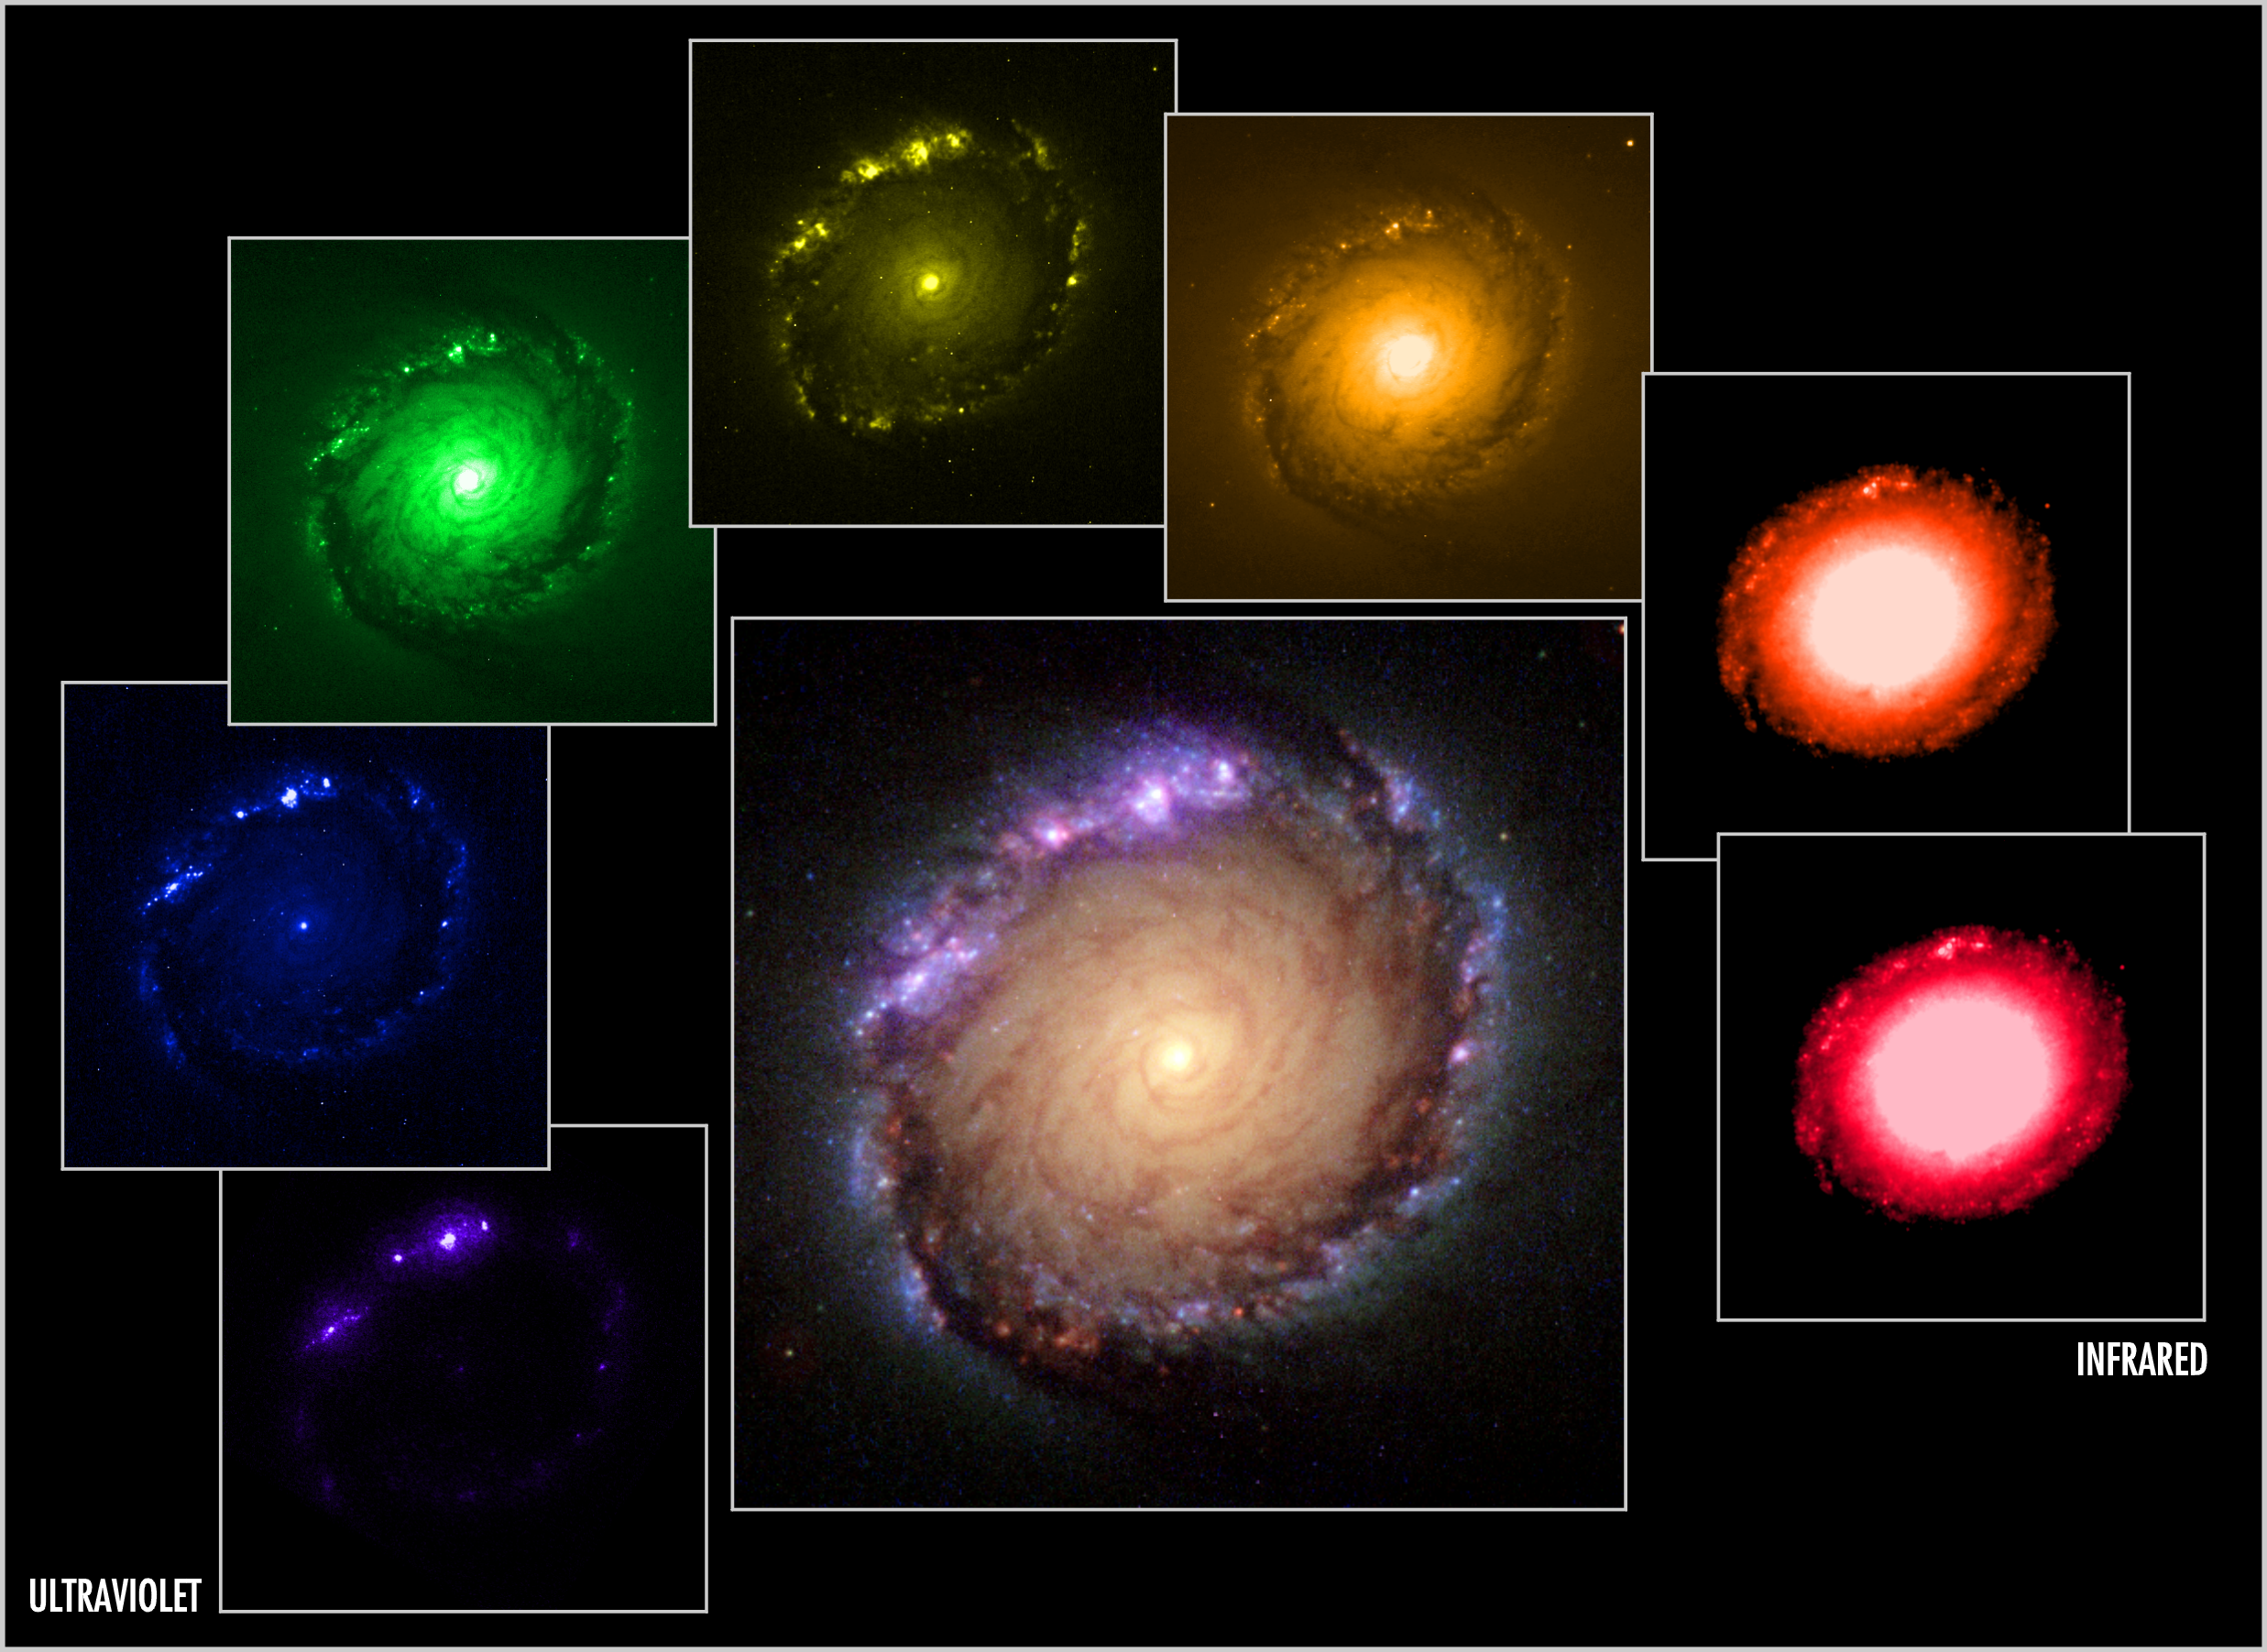

Panel of multi-wavelength and composite images of NGC 1512

Astronomers have used this set of single-colour images, shown around the edge, to construct the colour picture (centre) of a ring of star clusters surrounding the core of the galaxy NGC 1512. These pictures were taken by the NASA/ESA Hubble Space Telescope's Faint Object Camera (FOC), Wide Field and Planetary Camera 2 (WFPC2), and the Near Infrared Camera and Multi-Object Spectrometer (NICMOS).

Each image represents a specific colour or wavelength region of the spectrum, from ultraviolet to near infrared, and shows the wide wavelength region covered by Hubble. Celestial bodies emit light at a variety of wavelengths, anywhere from gamma rays to radio waves. Astronomers chose to study NGC 1512 in these colours to emphasise important details in the ring of young star clusters surrounding the core.

This image is issued jointly by NASA and ESA.

Credit: NASA, ESA, Dan Maoz (Tel-Aviv University, Israel, and Columbia University, USA)